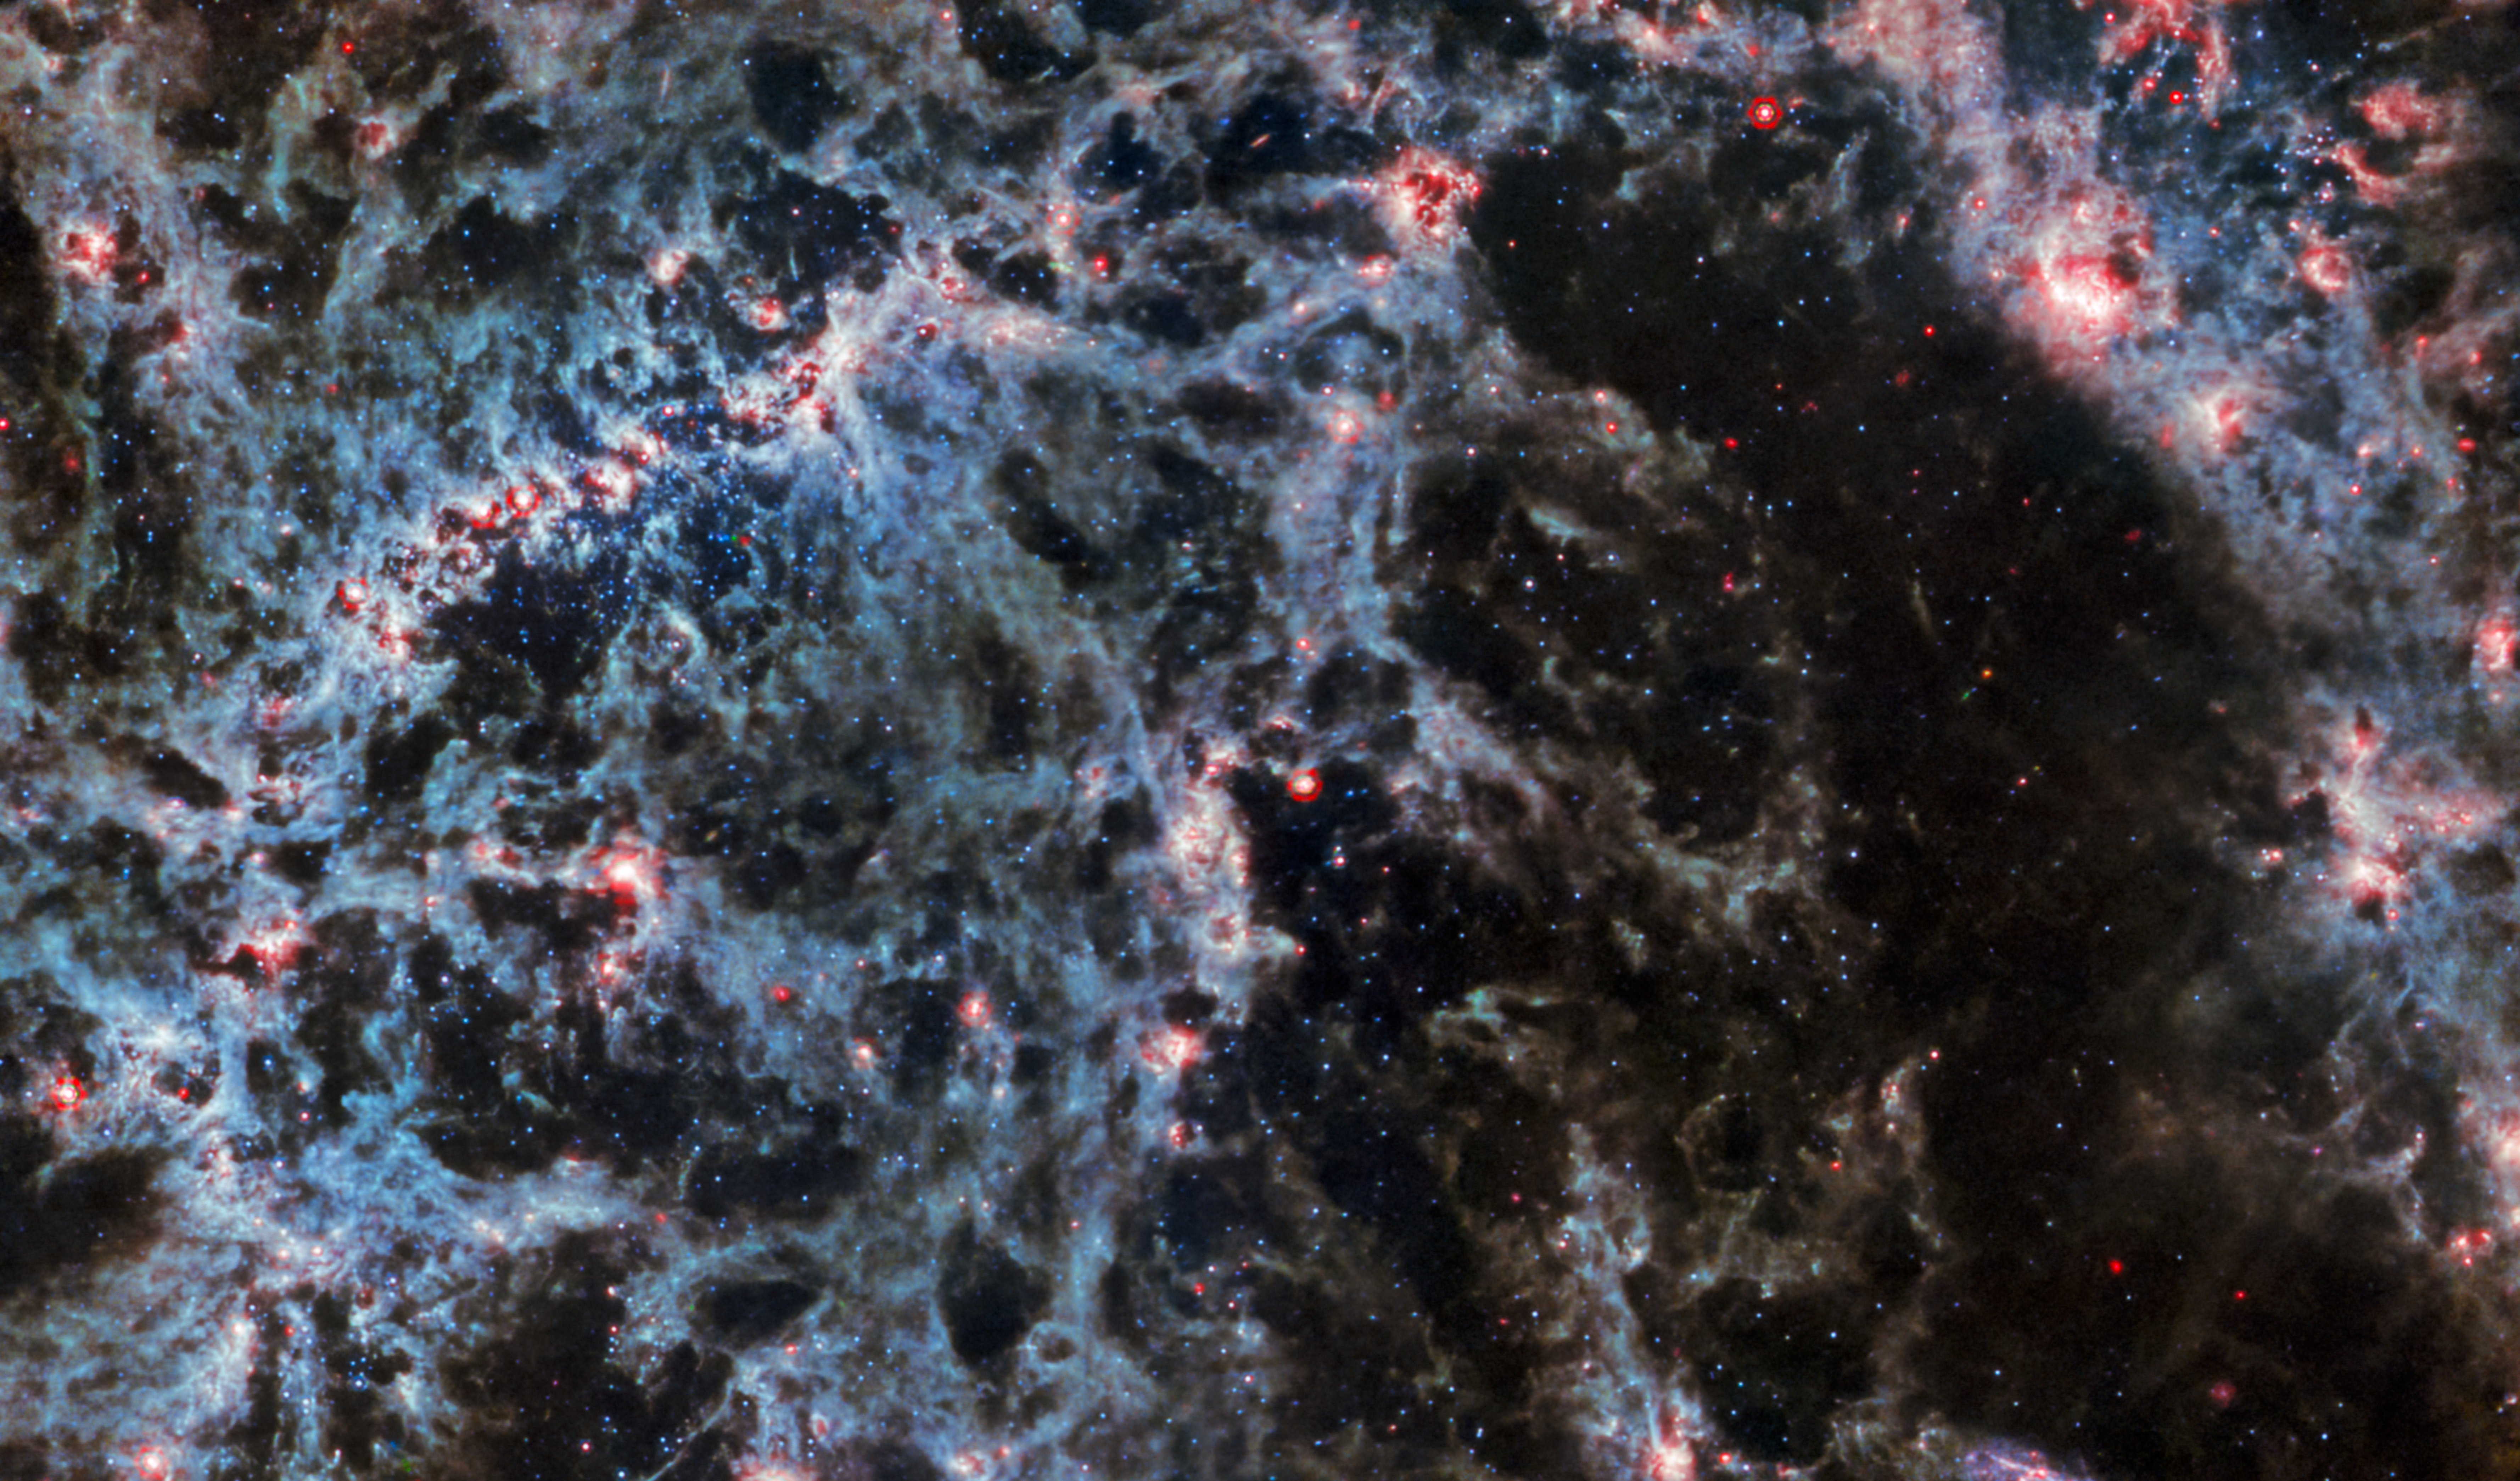

NGC 5068 (MIRI image)

A delicate tracery of dust and bright star clusters threads across this image from the NASA/ESA/CSA James Webb Space Telescope. In this image, from Webb’s MIRI instrument, the dusty structure of the spiral galaxy and glowing bubbles of gas containing newly-formed star clusters are particularly prominent. These bright tendrils of gas belong to the barred spiral galaxy NGC 5068, located around 17 million light-years from Earth in the constellation Virgo.

Learn more about this image here.

MIRI was contributed by ESA and NASA, with the instrument designed and built by a consortium of nationally funded European Institutes (The MIRI European Consortium) in partnership with JPL and the University of Arizona.

Credit: ESA/Webb, NASA & CSA, J. Lee and the PHANGS-JWST Team